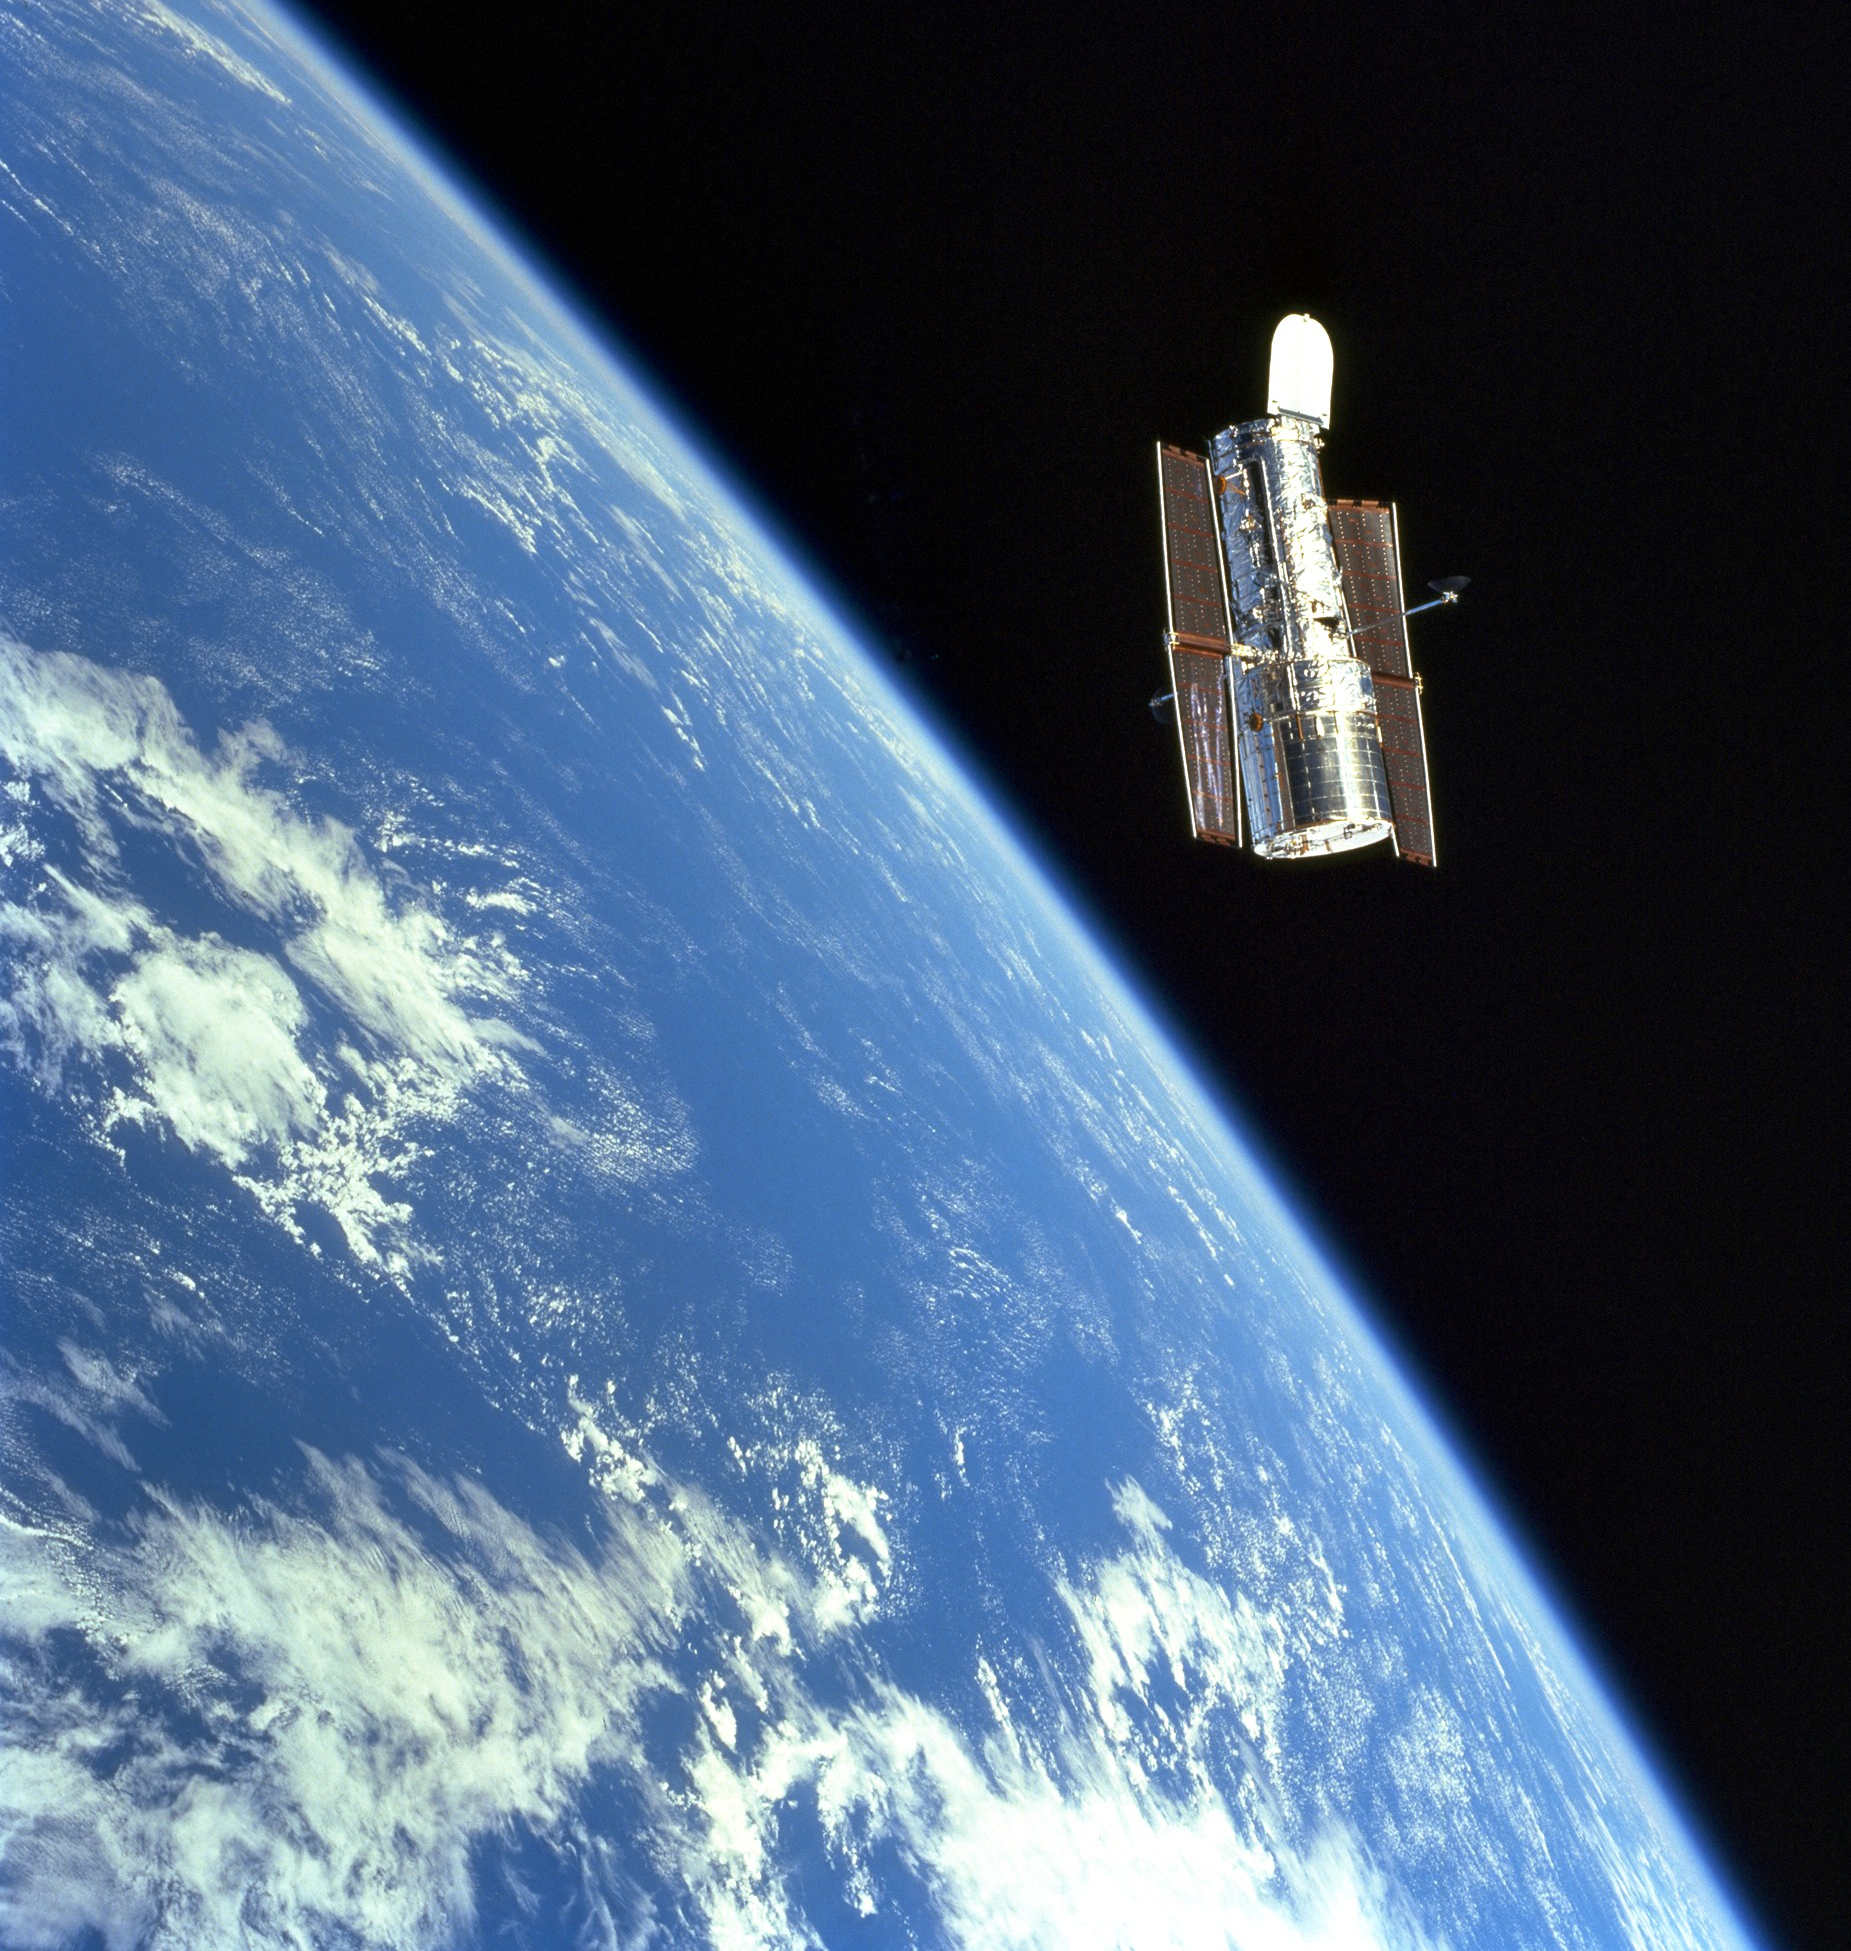

SM3A: Graceful Hubble

The Hubble Space Telescope (HST) floats gracefully above the blue Earth after release from Discovery's robot arm after a successful servicing mission.

Credit: NASA/ESA